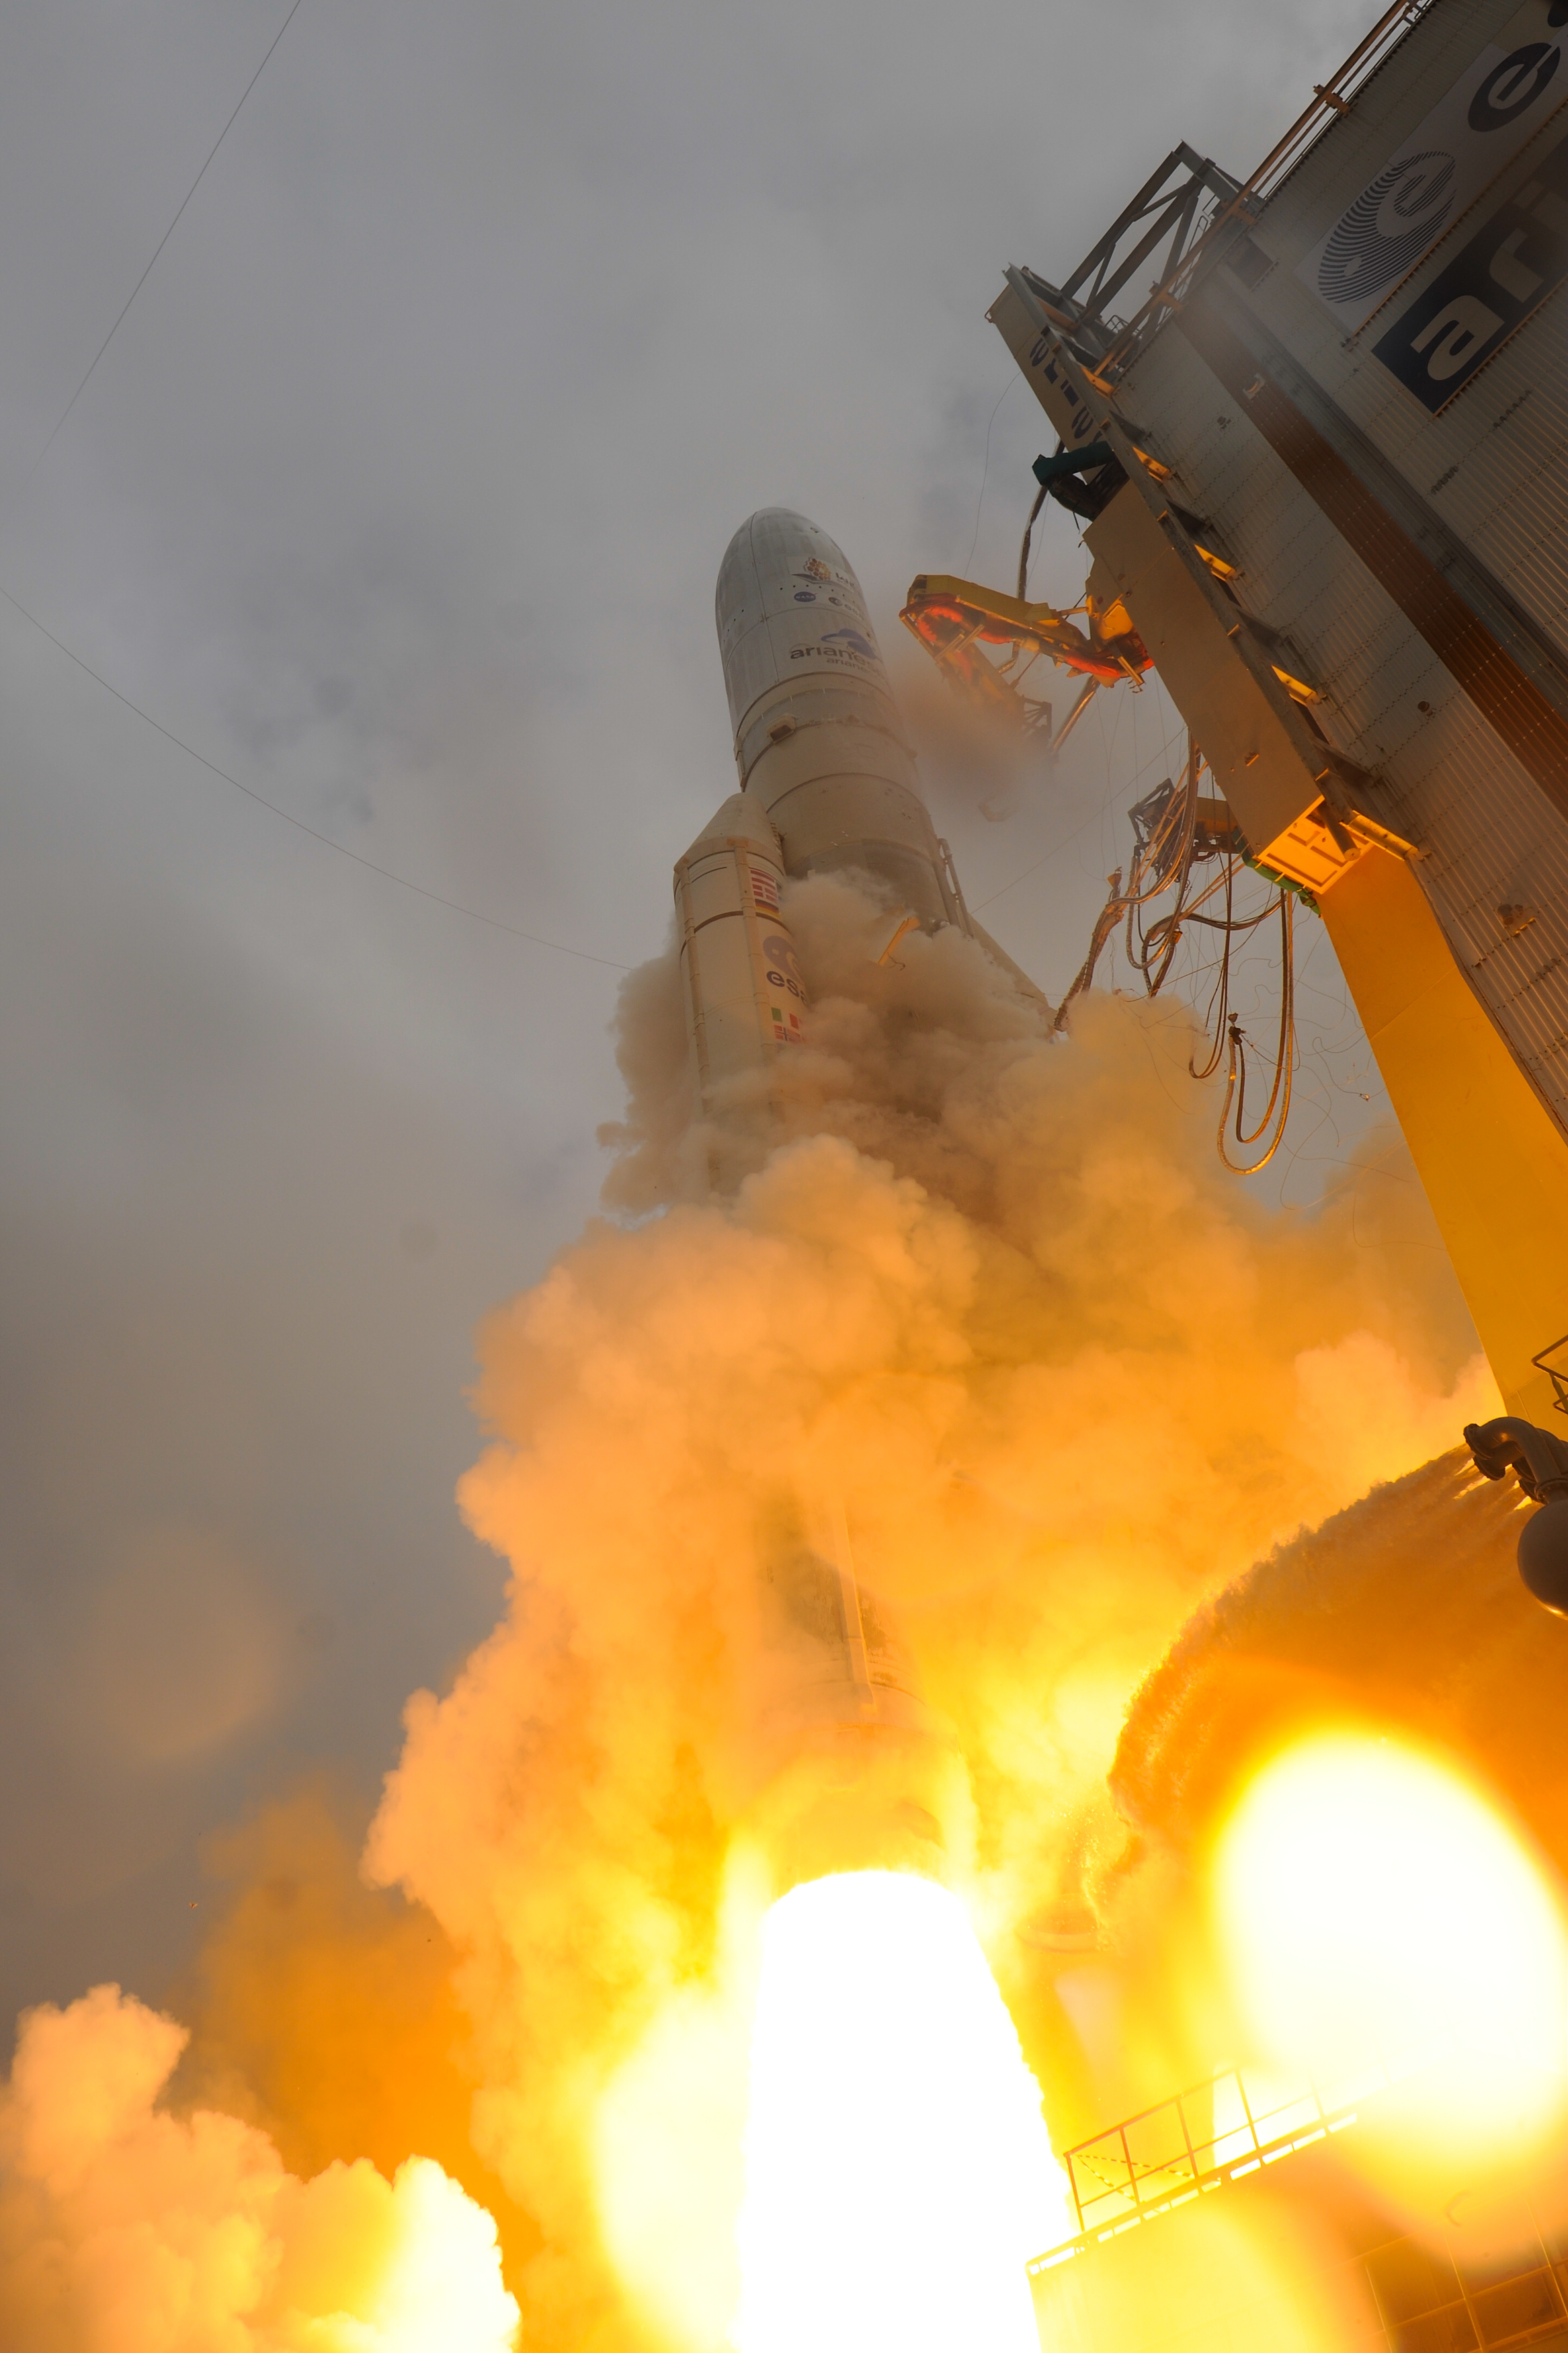

Webb liftoff on Ariane 5

The James Webb Space Telescope lifted off on an Ariane 5 rocket from Europe’s Spaceport in French Guiana, at 13:20 CET on 25 December on its exciting mission to unlock the secrets of the Universe.

Credit: ESA - S. Corvaja